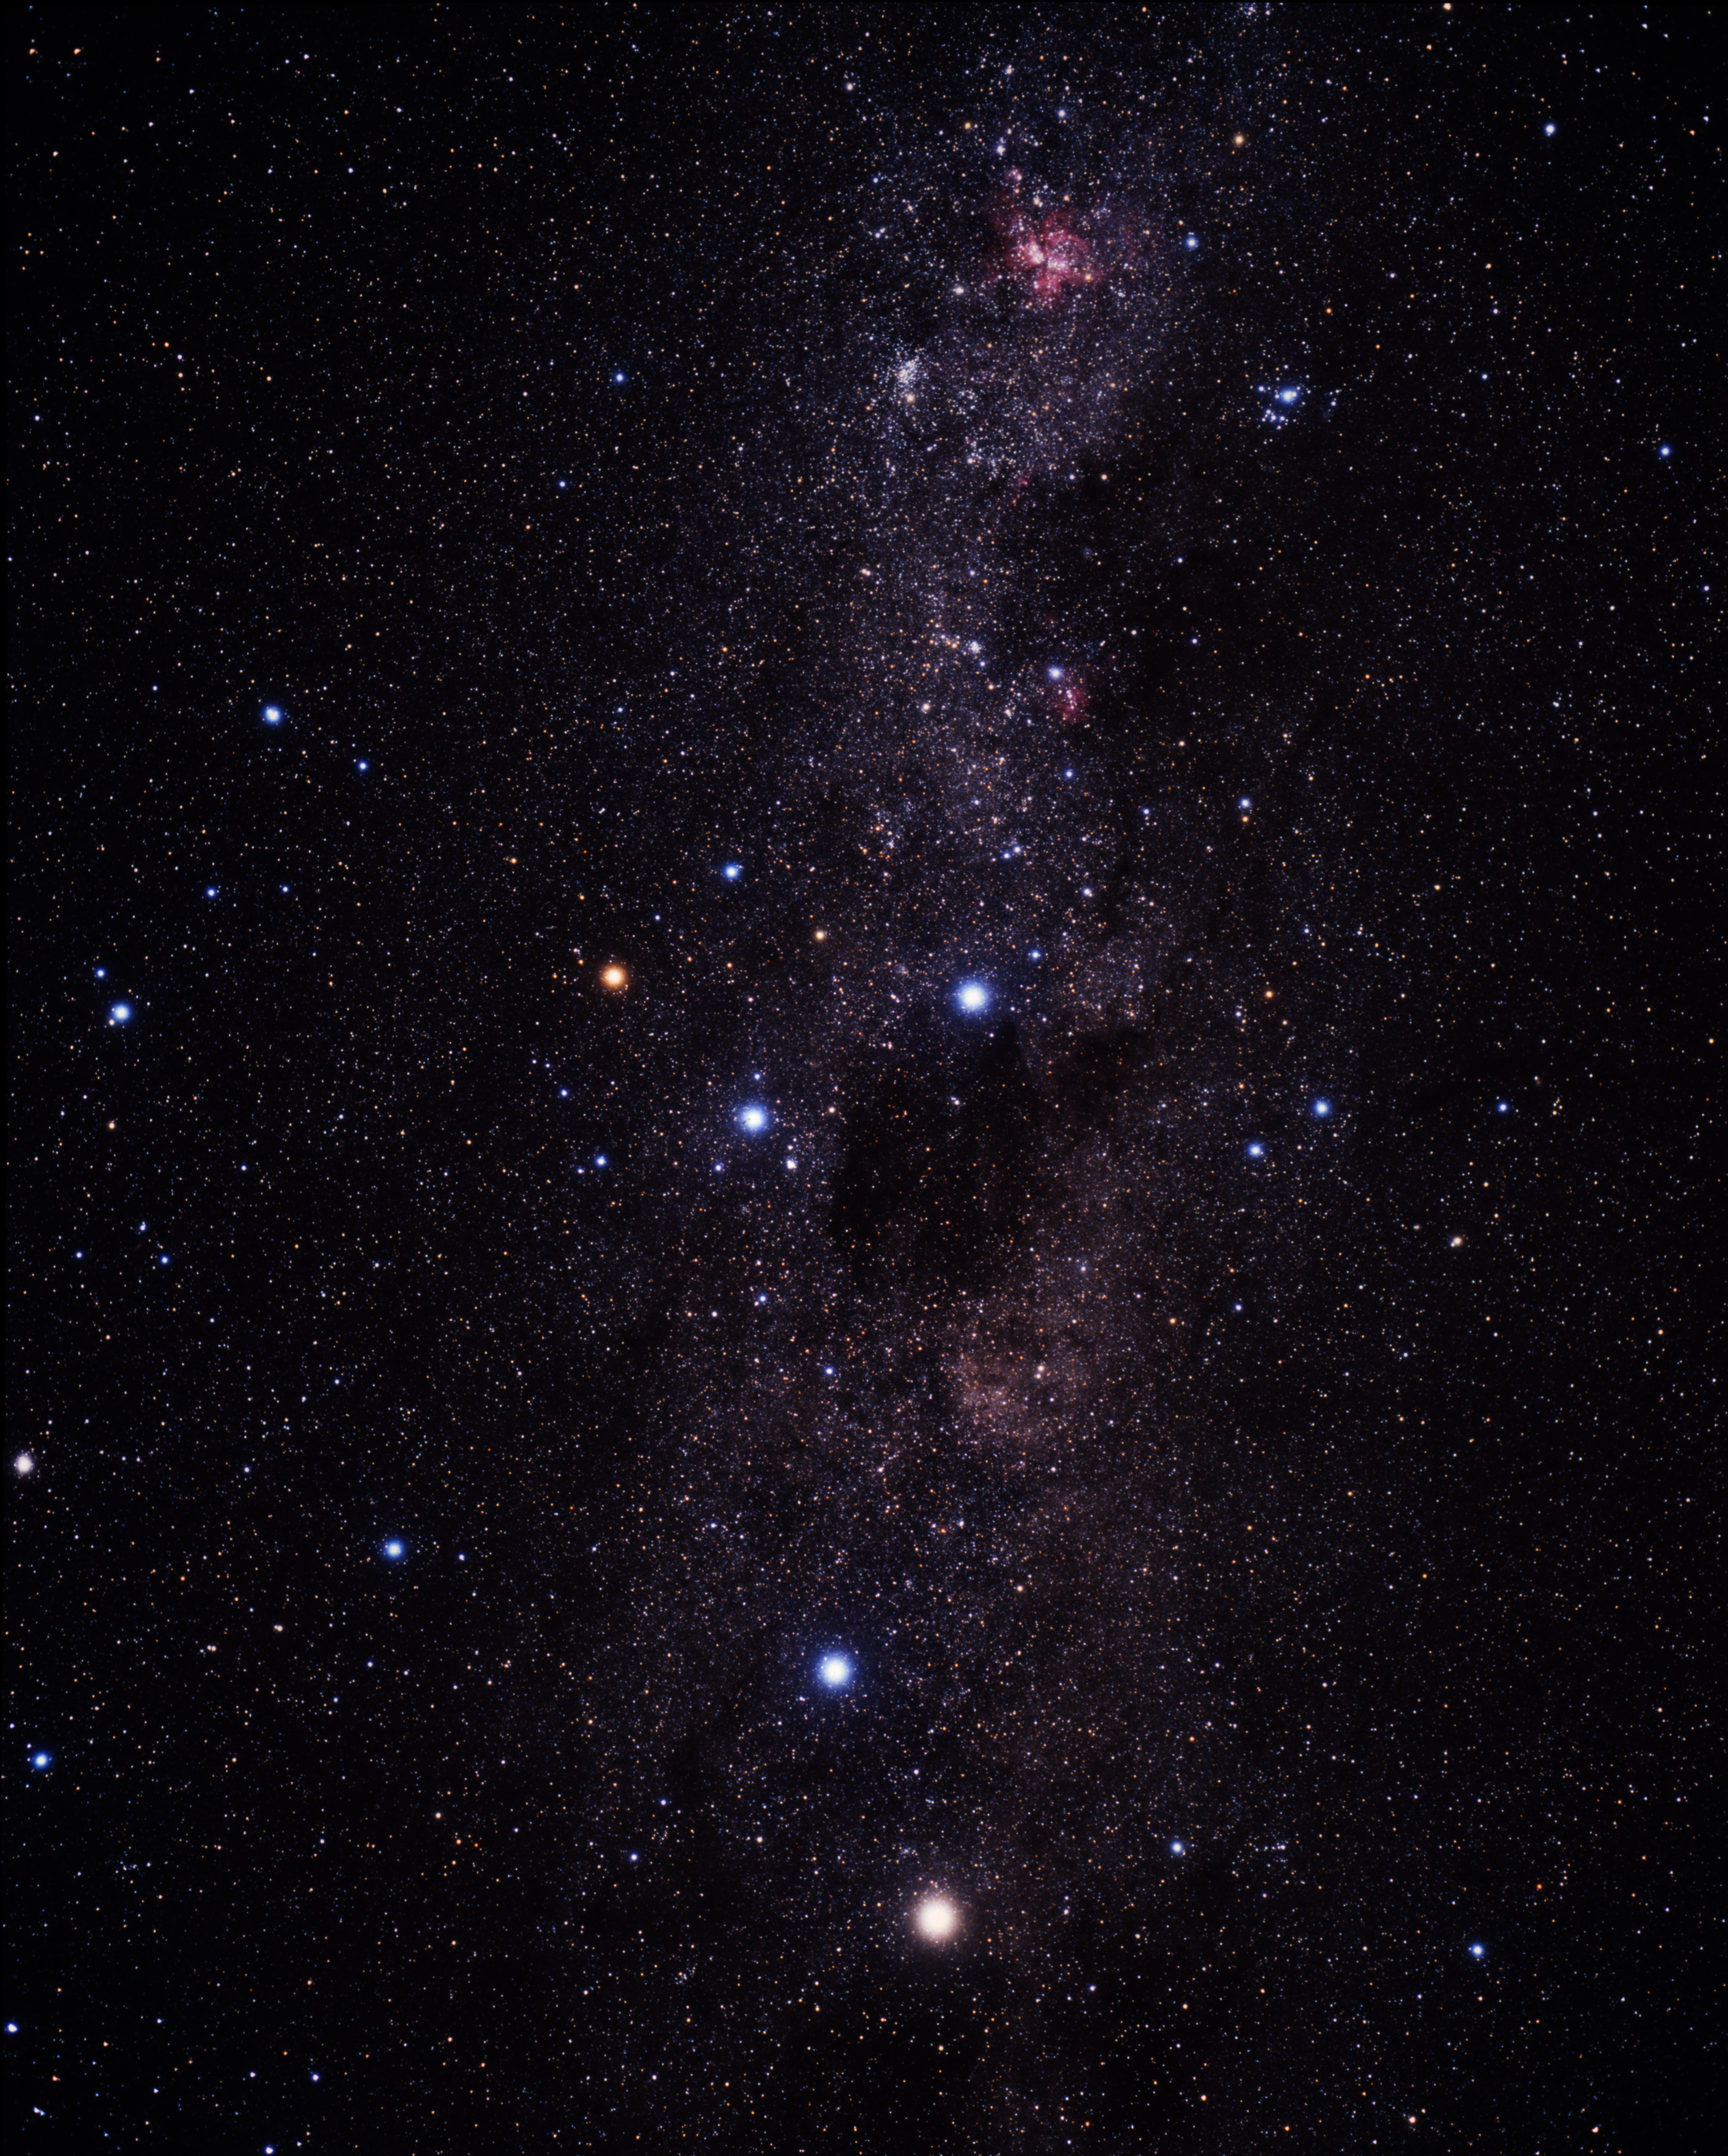

Wide-field image of the Southern Milky-Way (ground-based image)

A wide-field, ground-based image showing the southern Milky Way from Centaurus at the bottom to Carina on the top. The Carina Nebula is seen as a reddish patch on the top.

Credit: A. Fujii